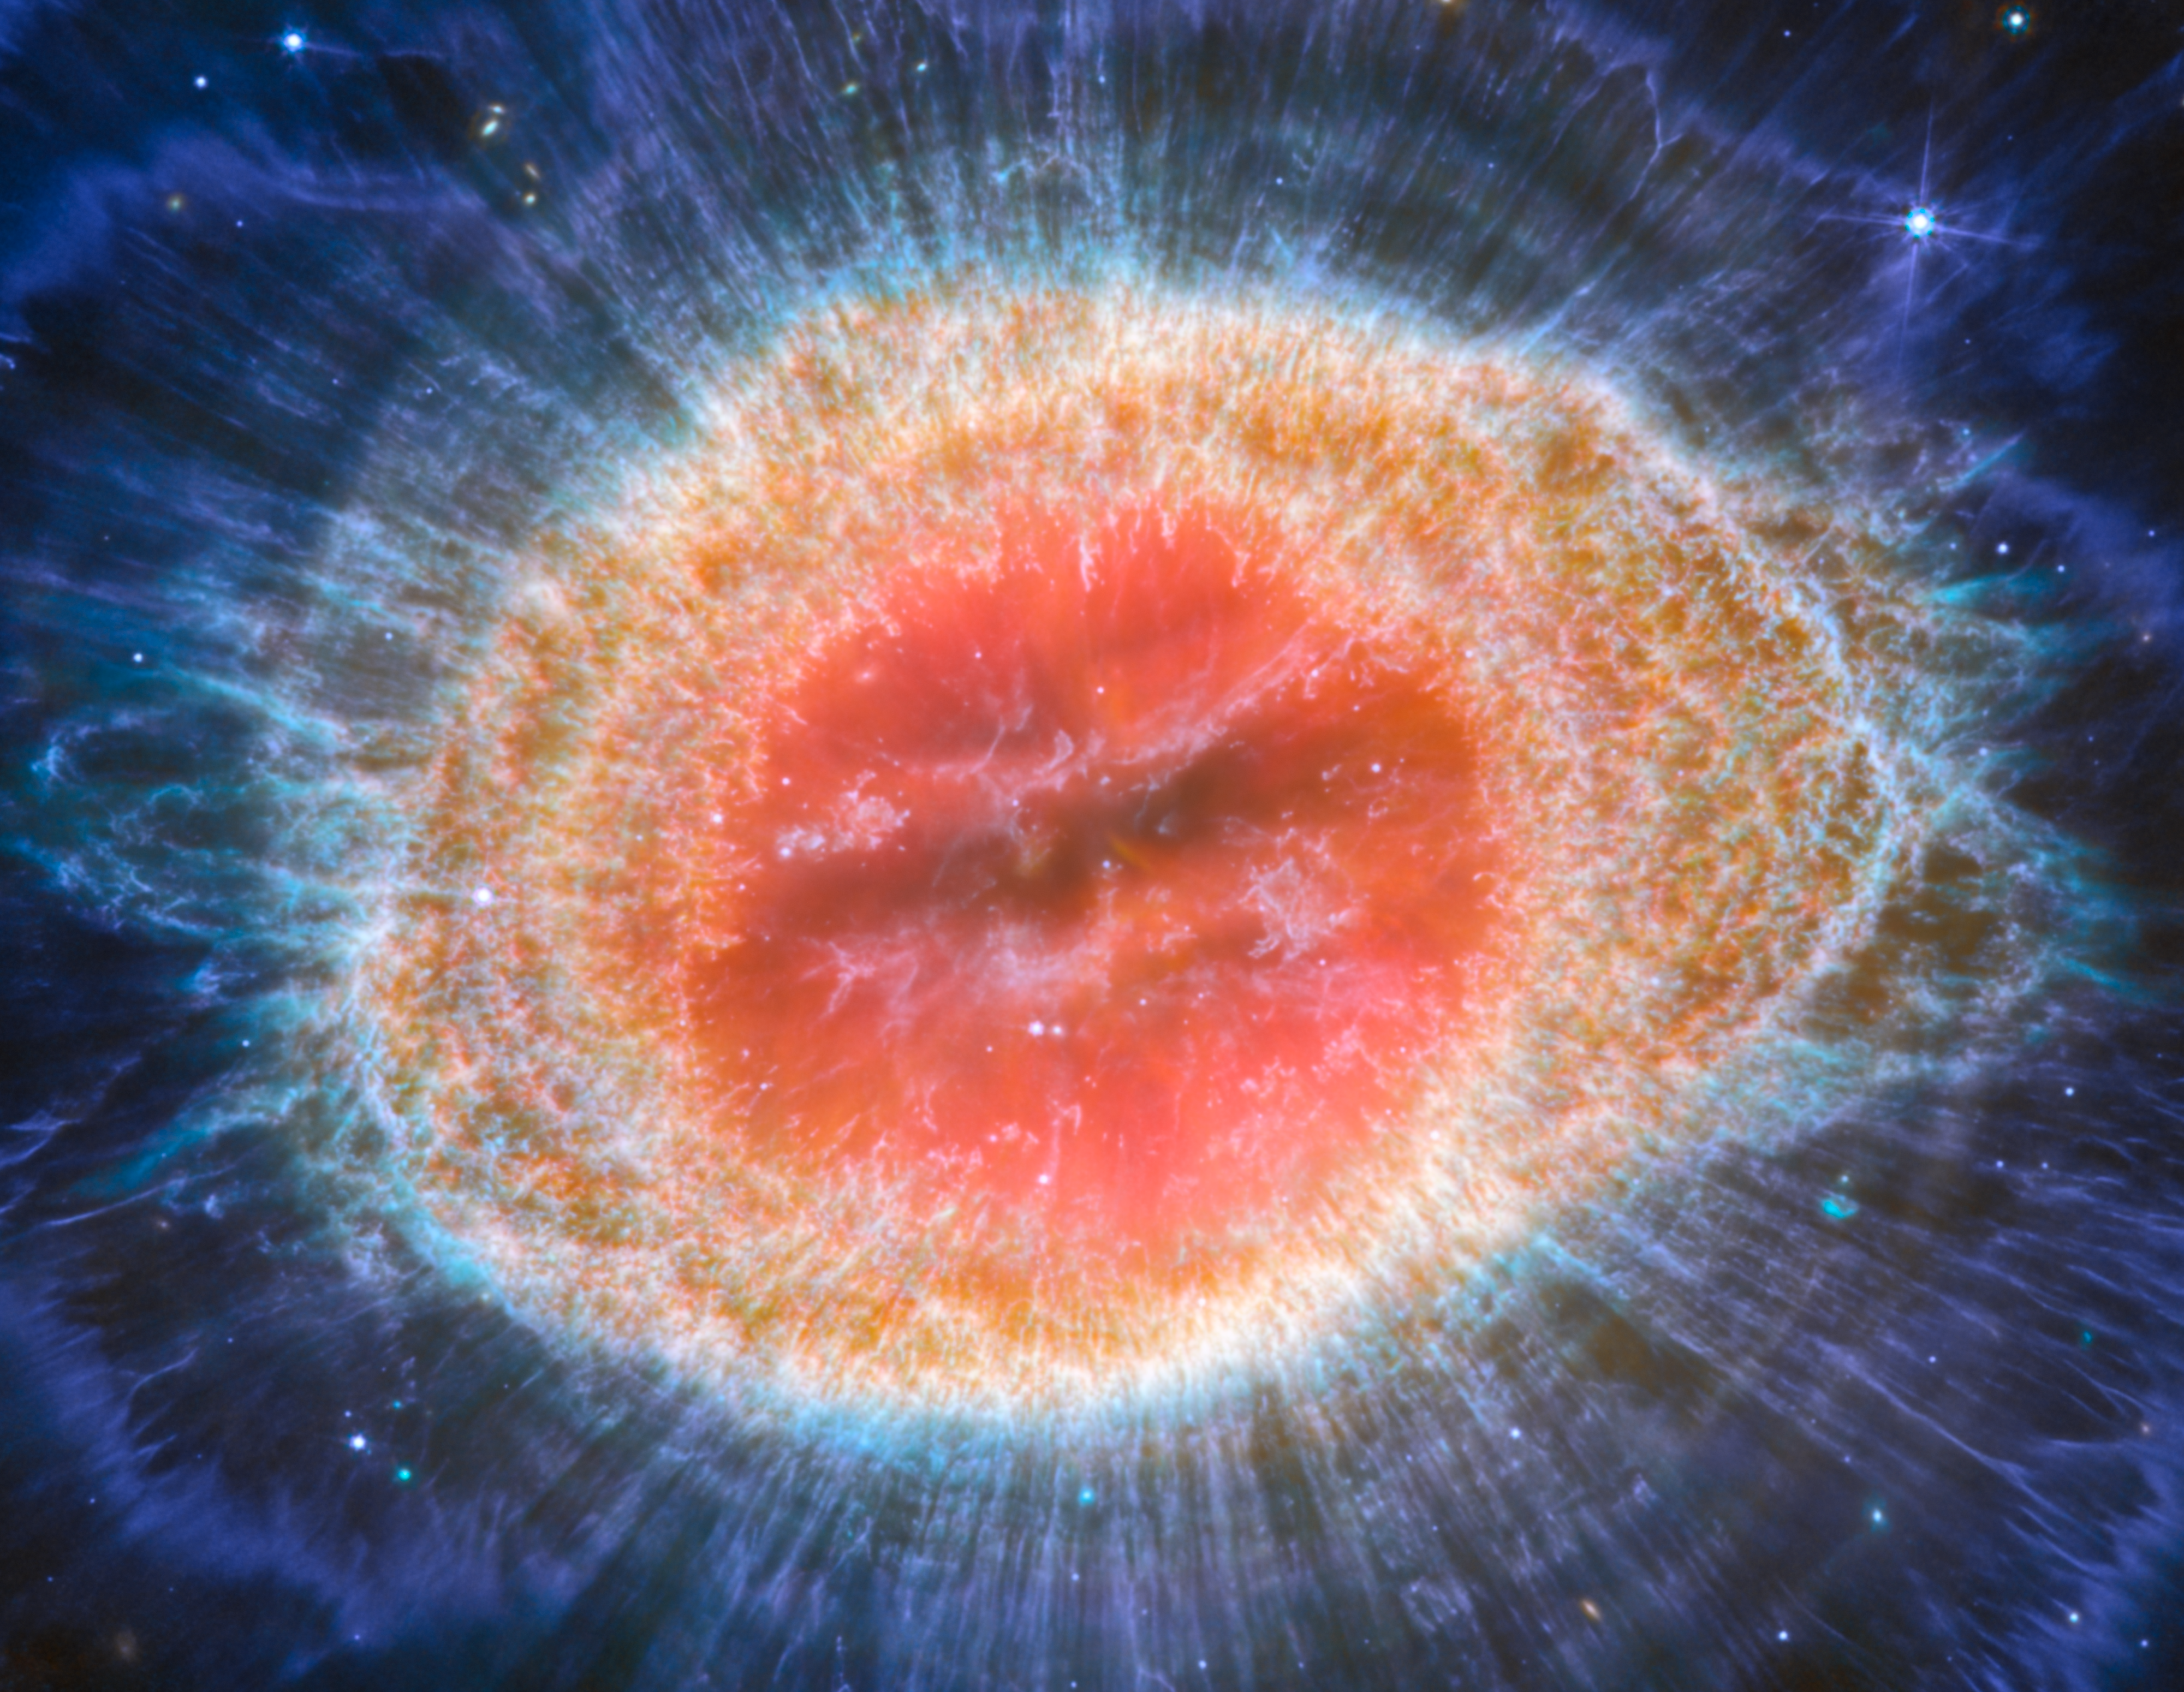

Webb captures detailed beauty of Ring Nebula (MIRI image - cropped)

The NASA/ESA/CSA James Webb Space Telescope has observed the well-known Ring Nebula with unprecedented detail. Formed by a star throwing off its outer layers as it runs out of fuel, the Ring Nebula is an archetypal planetary nebula. Also known as M57 and NGC 6720, it is both relatively close to Earth at roughly 2,500 light-years away.

This new image provides unprecedented spatial resolution and spectral sensitivity. In particular, Webb’s MIRI (Mid-InfraRed Instrument) reveals particular details in the concentric features in the outer regions of the nebulae’s ring (right).

There are some 20,000 dense globules in the nebula, which are rich in molecular hydrogen. In contrast, the inner region shows very hot gas. The main shell contains a thin ring of enhanced emission from carbon-based molecules known as polycyclic aromatic hydrocarbons (PAHs). Roughly ten concentric arcs are located just beyond the outer edge of the main ring. The arcs are thought to originate from the interaction of the central star with a low-mass companion orbiting at a distance comparable to that between the Earth and the dwarf planet Pluto. In this way, nebulae like the Ring Nebula reveal a kind of astronomical archaeology, as astronomers study the nebula to learn about the star that created it.

Credit: ESA/Webb, NASA, CSA, M. Barlow, N. Cox, R. Wesson